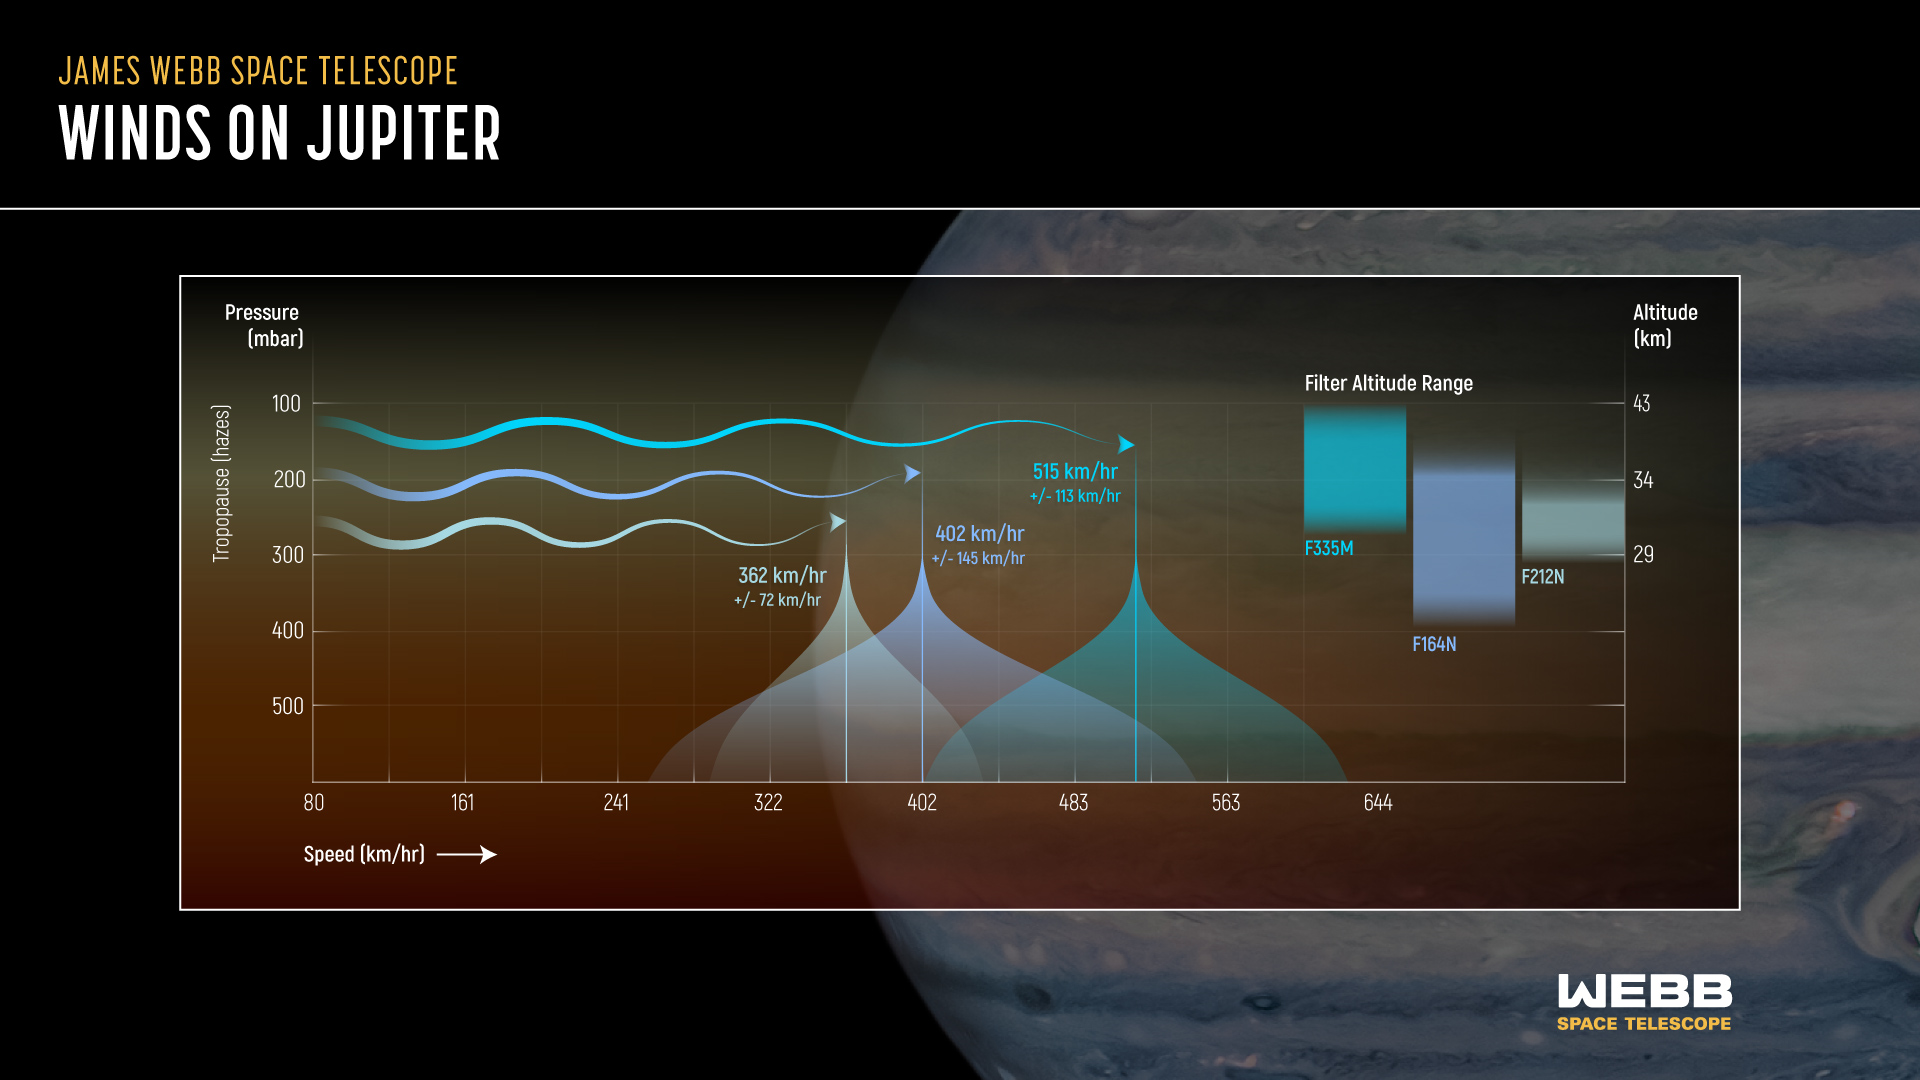

Jupiter’s atmosphere

Astronomers using the NASA/ESA/CSA James Webb Space Telescope have discovered a high-speed jet stream traveling over Jupiter’s equator above the main cloud decks. The jet is traveling 515 kilometers per hour. It is located around 40 kilometers in altitude, in Jupiter’s lower stratosphere, just above the tropospheric hazes next to the boundary between the layers.

Jupiter has a layered atmosphere, and this illustration displays how Webb is uniquely capable of collecting information from higher layers of the altitude than before. Scientists were able to use Webb to identify wind speeds at different layers of Jupiter’s atmosphere in order to isolate the high-speed jet. The observations of Jupiter were taken 10 hours apart, or one Jupiter day, in three different filters, noted here, each uniquely able to detect changes in small features at different altitudes of Jupiter’s atmosphere.

The discovery of this jet is giving insights into how the layers of Jupiter’s famously turbulent atmosphere interact with each other, and how Webb is uniquely capable of tracking those features. Researchers are looking forward to additional observations of Jupiter with Webb to determine if the jet’s speed and altitude change over time.

These results were recently published in Nature Astronomy.

These findings may help inform ESA’s Jupiter Icy Moons Explorer, Juice, which was launched on 14 April 2023. Juice will make detailed observations of the giant gas planet and its three large ocean-bearing moons — Ganymede, Callisto and Europa — with a suite of remote sensing, geophysical and in situ instruments. The mission will characterise these moons as both planetary objects and possible habitats, explore Jupiter’s complex environment in depth, and study the wider Jupiter system as an archetype for gas giants across the Universe.

Credit: NASA, ESA, CSA, STScI, Image: NASA, ESA, CSA, STScI, R. Hueso (University of the Basque Country), I. de Pater (University of California, Berkeley), T. Fouchet (Observatory of Paris), L. Fletcher (University of Leicester), M. Wong (University of California, Berkeley), A. James (STScI)